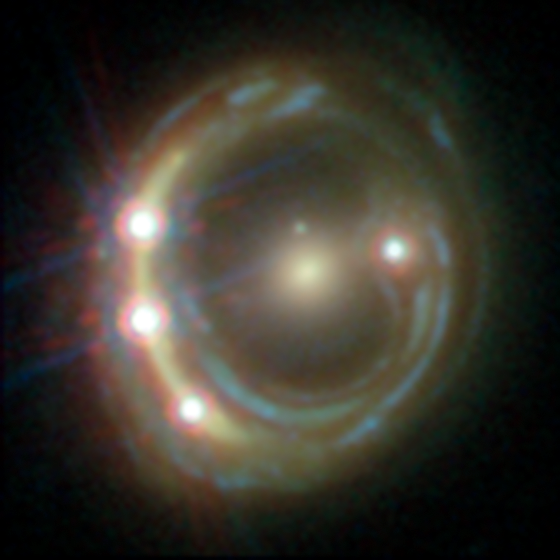

Lensed quasar

RXJ1131-1231 is among the five best lensed quasars discovered to date. The foreground galaxy smears the image of the background quasar into a bright arc (left) and creates a total of four images — three of which can be seen within the arc.

Credit: ESA/Hubble, NASA, Suyu et al.